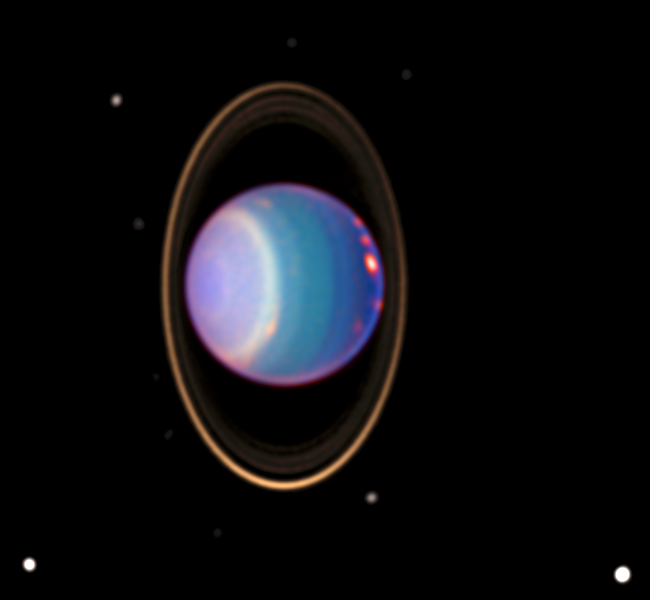

Many Bright Clouds on Uranus

A recent Hubble Space Telescope view reveals Uranus surrounded by its four major rings and by 10 of its 17 known satellites. This false-color image was generated by Erich Karkoschka using data taken on August 8, 1998, with Hubble's Near Infrared Camera and Multi-Object Spectrometer.

Credit: Erich Karkoschka (University of Arizona) and NASA/ESA